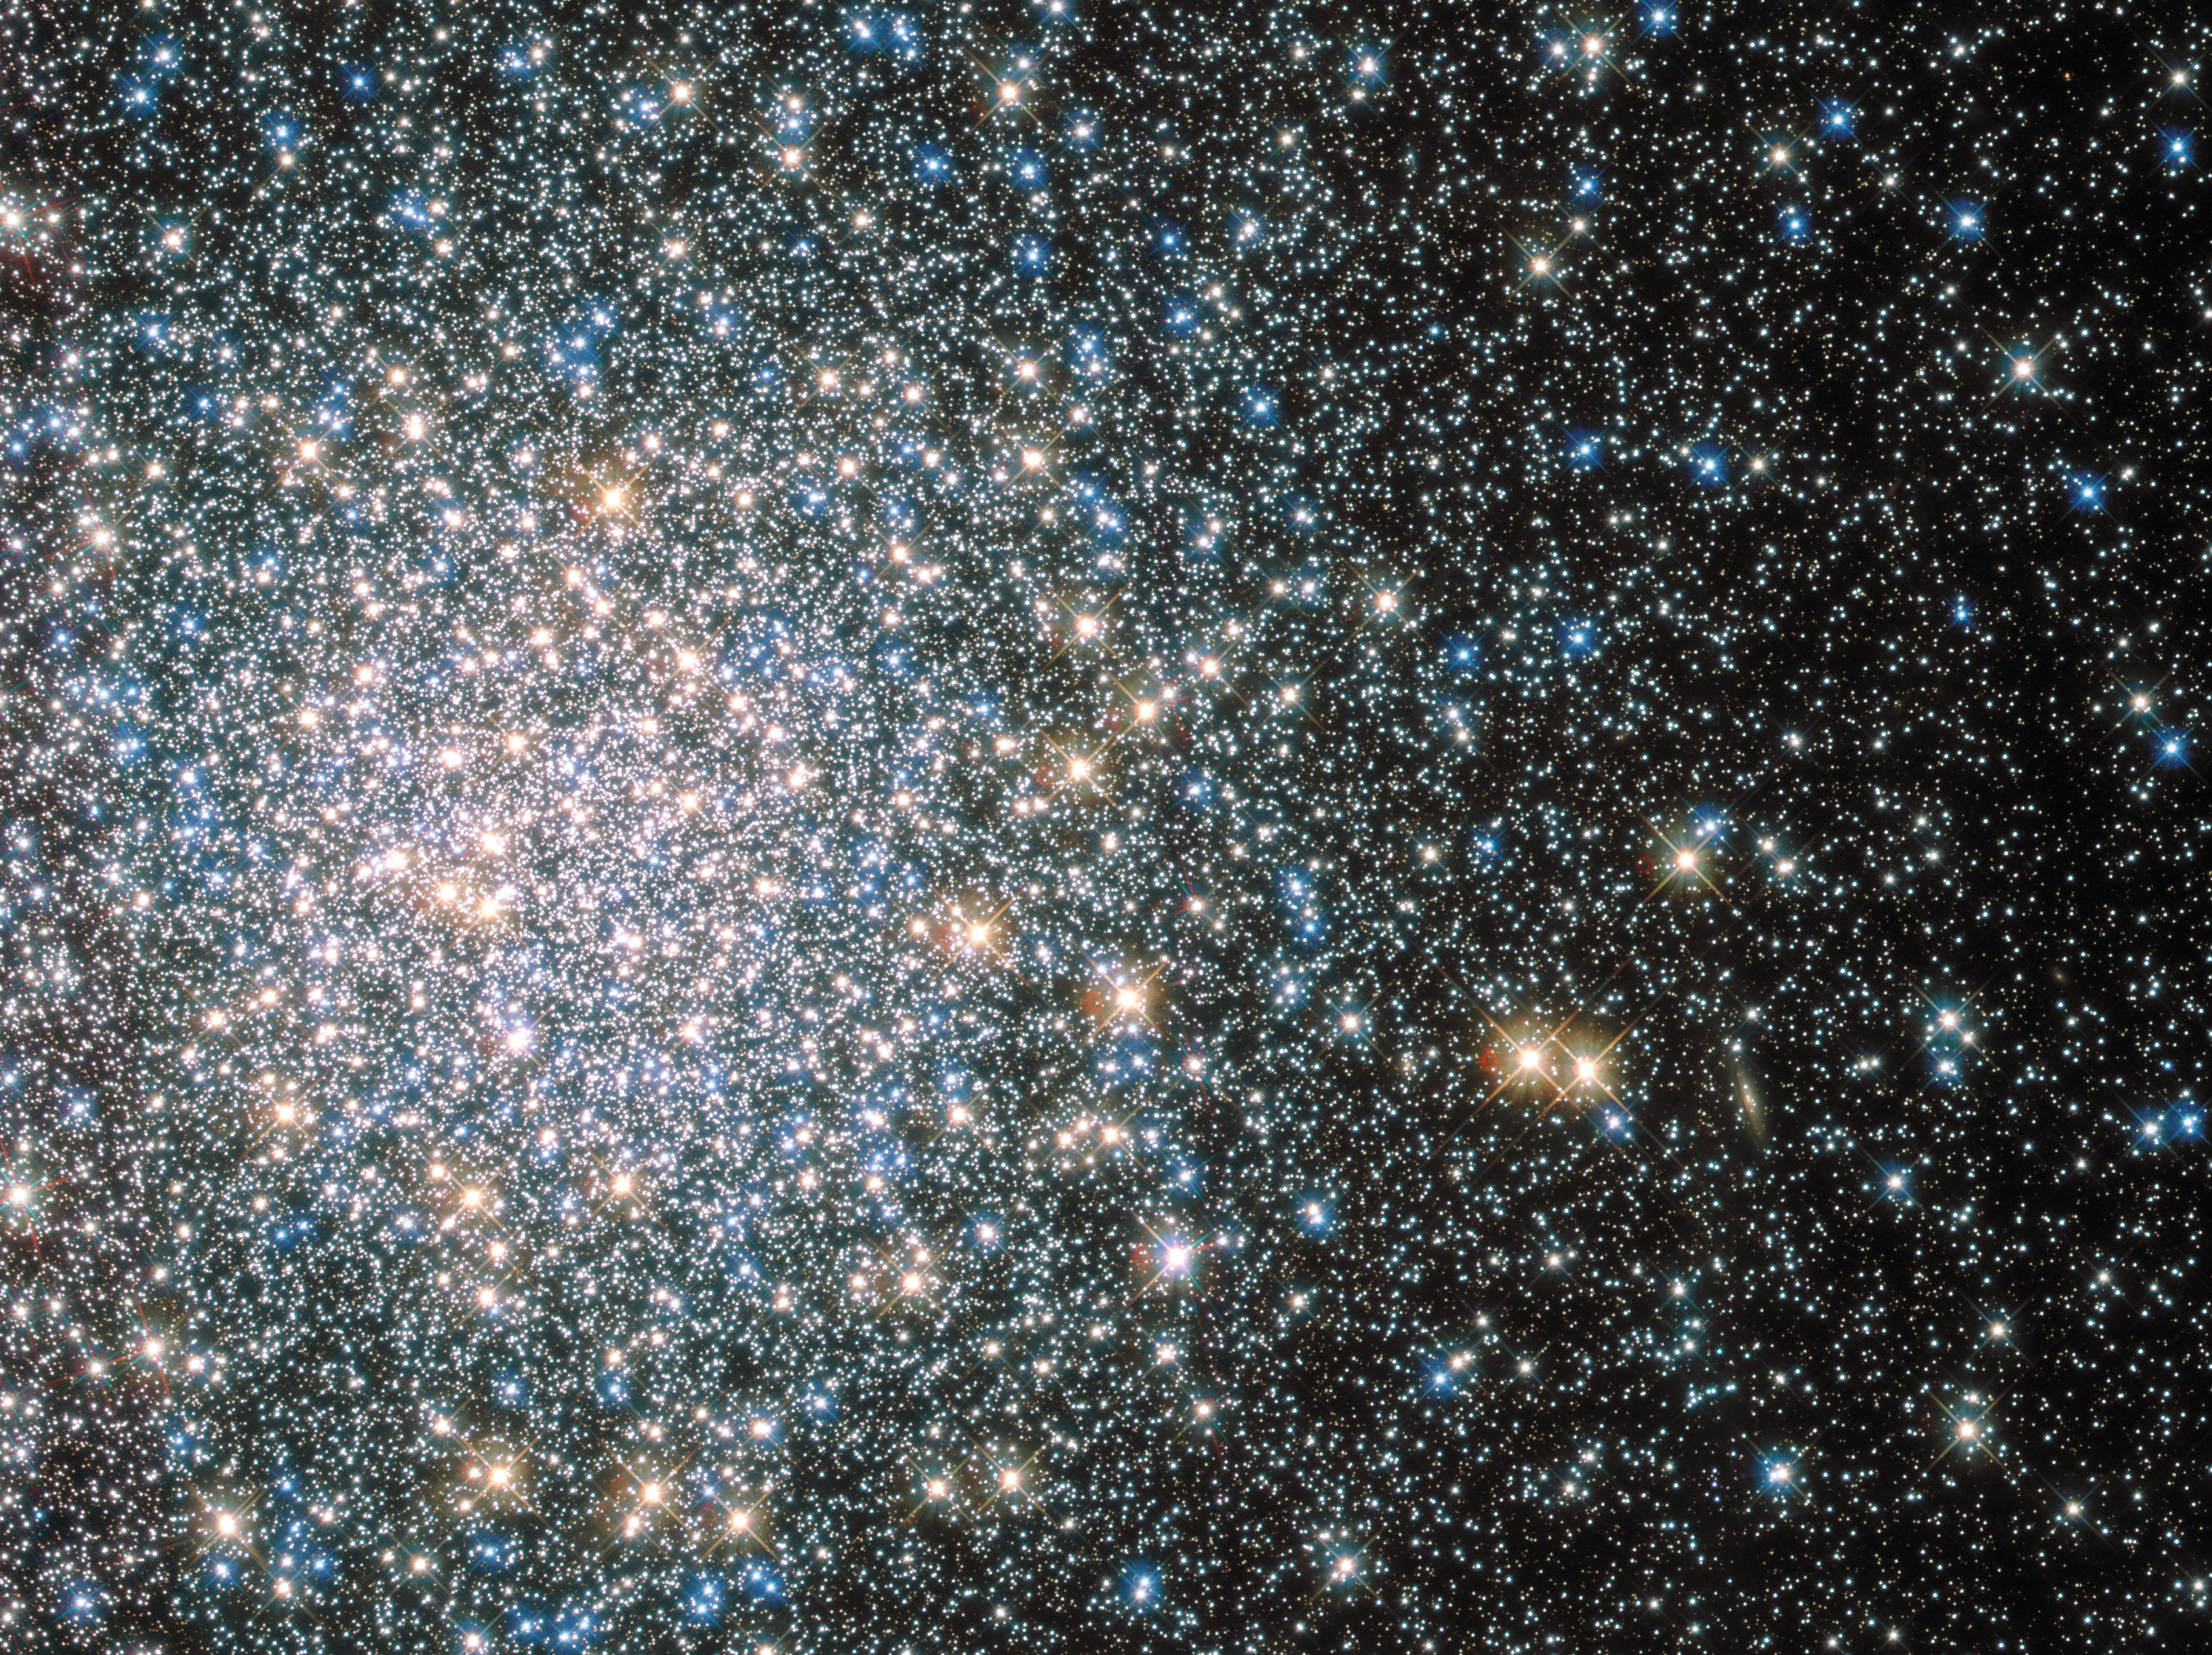

Cosmic fairy lights

This sparkling jumble is Messier 5 — a globular cluster consisting of hundreds of thousands of stars bound together by their collective gravity.

But Messier 5 is no normal globular cluster. At 13 billion years old it is incredibly old, dating back to close to the beginning of the Universe, which is some 13.8 billion years of age. It is also one of the biggest clusters known, and at only 24 500 light-years away, it is no wonder that Messier 5 is a popular site for astronomers to train their telescopes on.

Messier 5 also presents a puzzle. Stars in globular clusters grow old and wise together. So Messier 5 should, by now, consist of old, low-mass red giants and other ancient stars. But it is actually teeming with young blue stars known as blue stragglers. These incongruous stars spring to life when stars collide, or rip material from one another.

Credit: ESA/Hubble & NASA